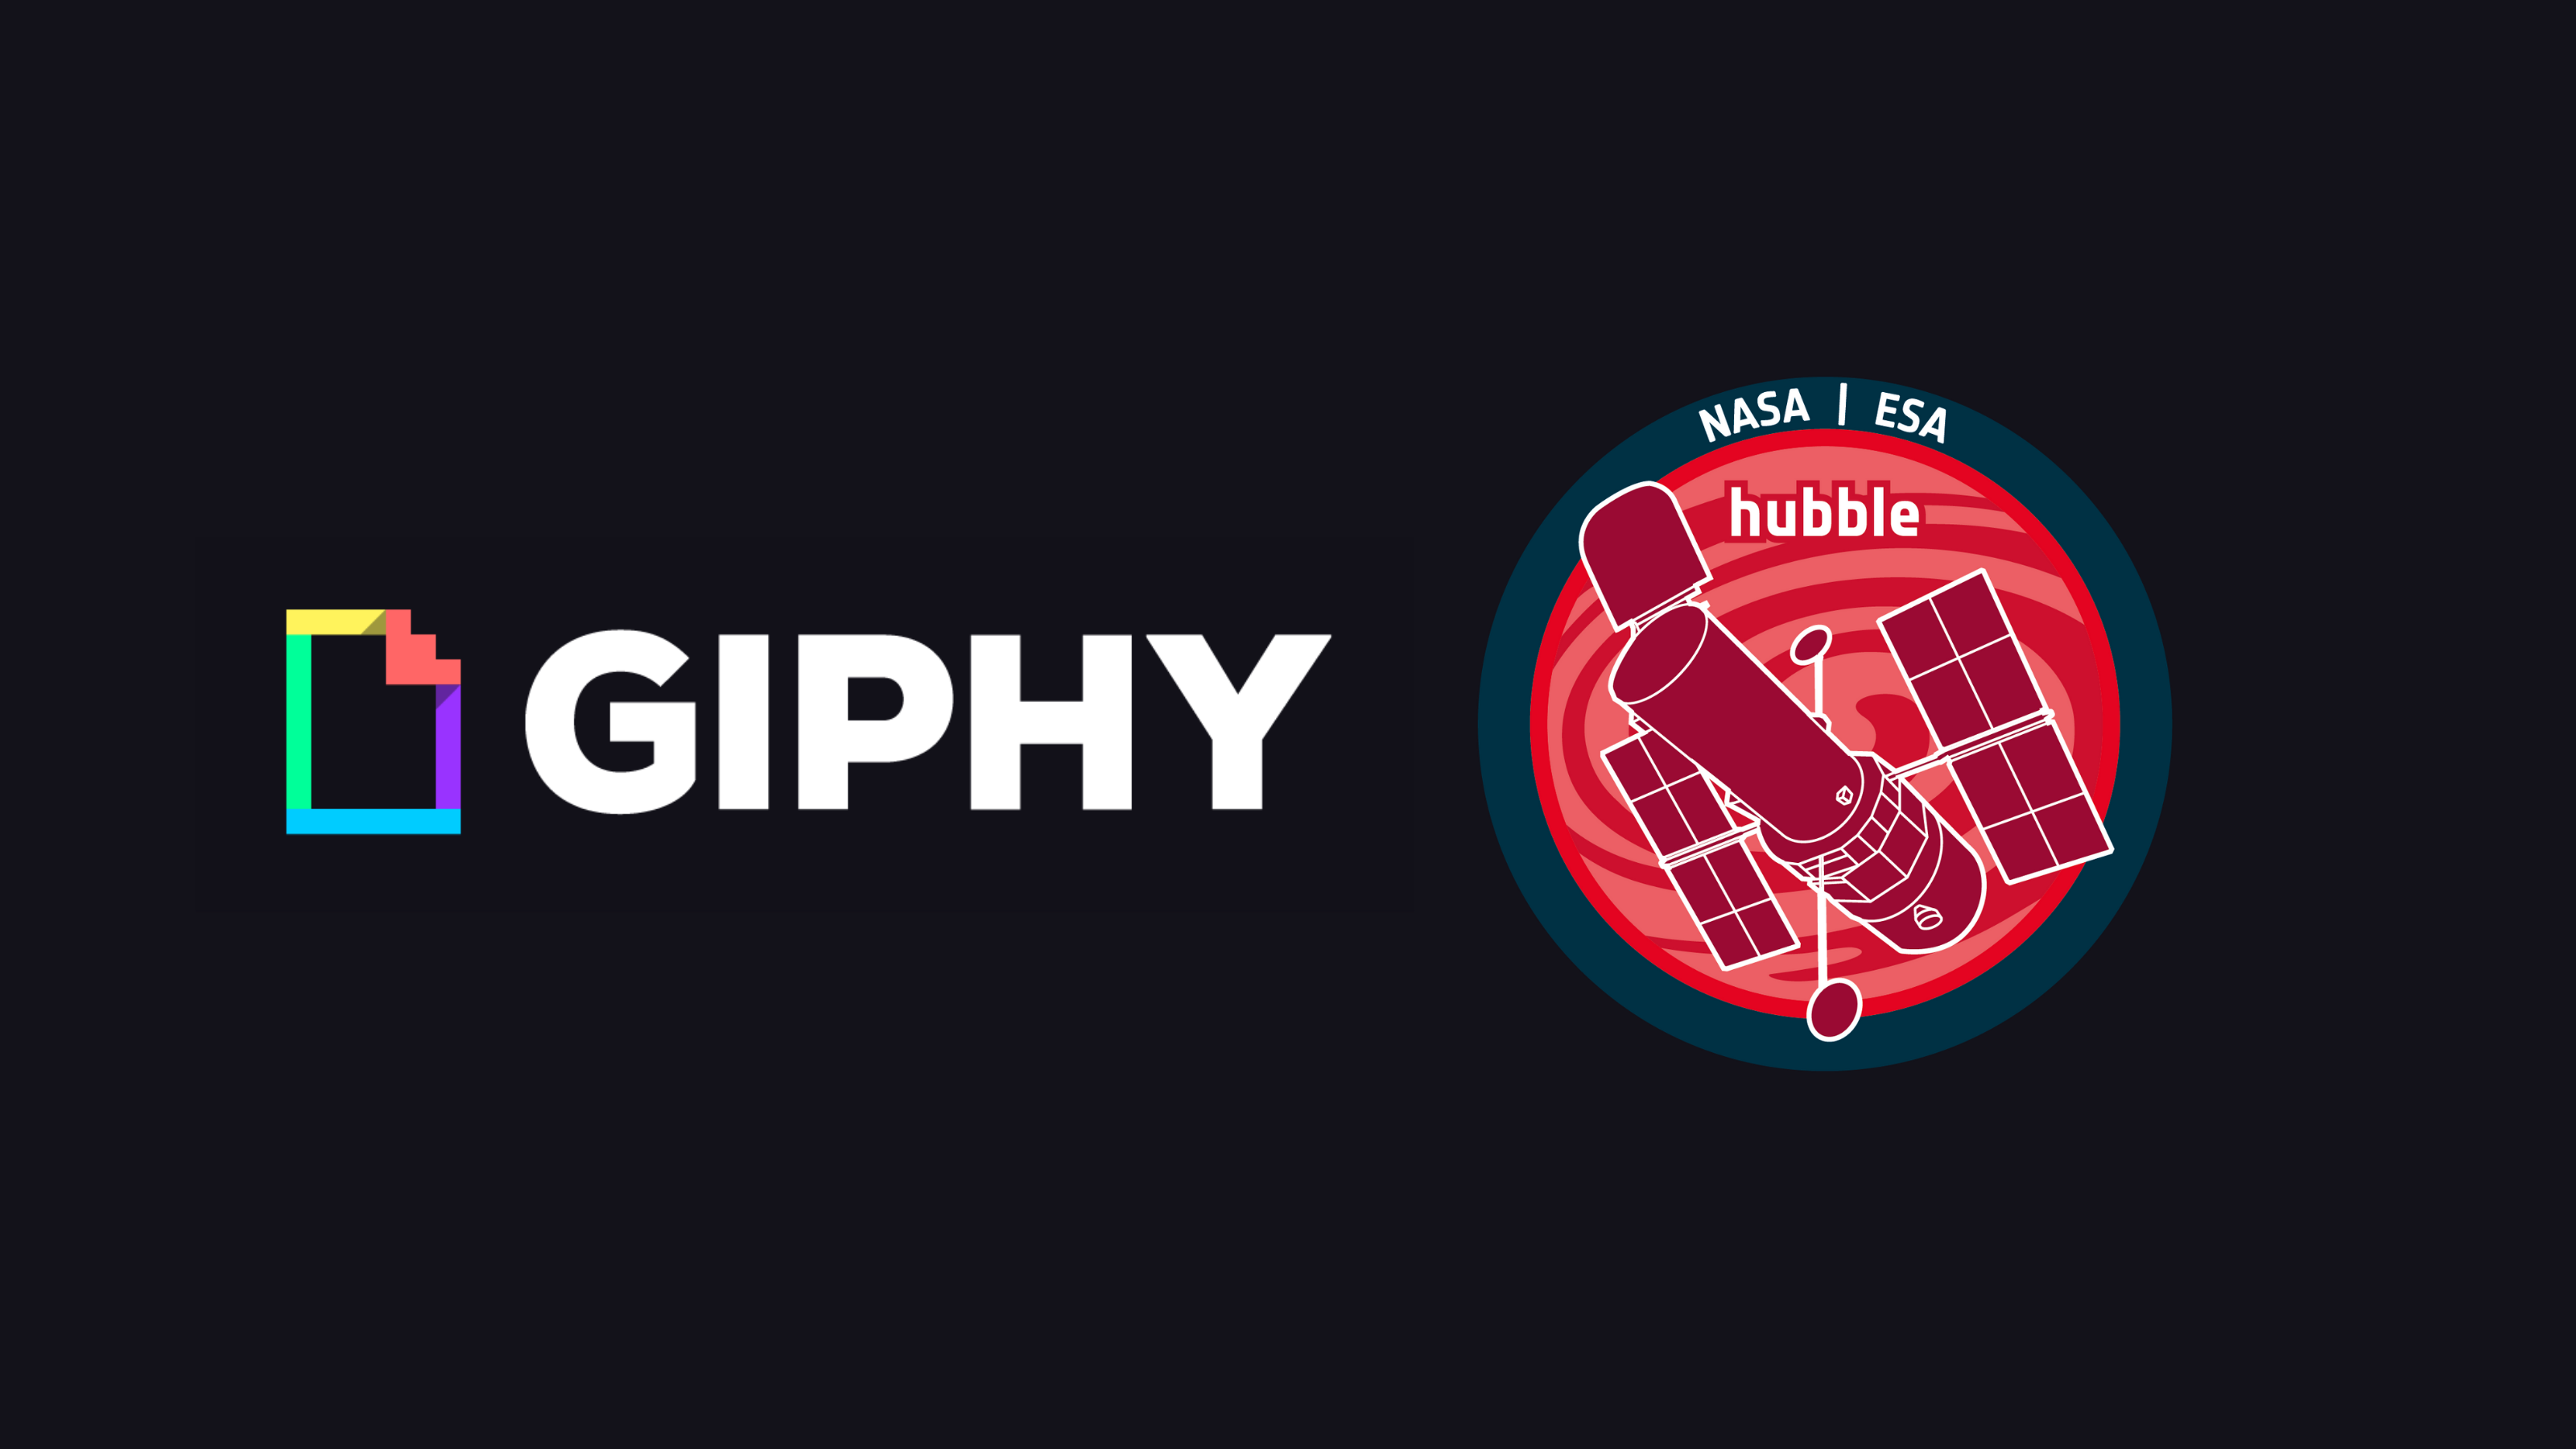

Announcement of the ESA/Hubble GIPHY Account

ESA/Hubble now has a GIPHY account, complete with looping videos of your favourite Hubble Space Telescope images, videos, and animations.

Credit: ESA/Hubble